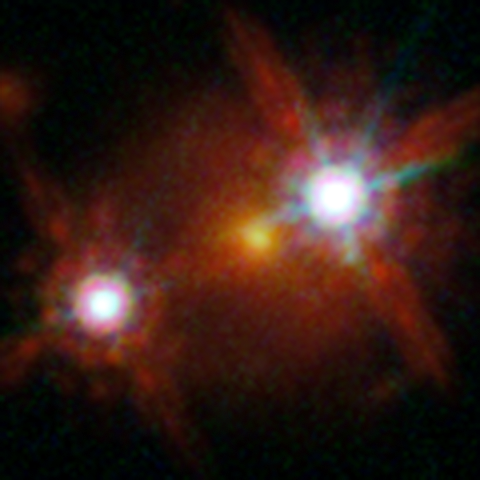

Lensed quasar

HE1104-1805 is among the five best lensed quasars discovered to date. The foreground galaxy in the centre of the image creates two distinct images of the distant quasar to both sides of it.

Credit: ESA/Hubble, NASA, Suyu et al.